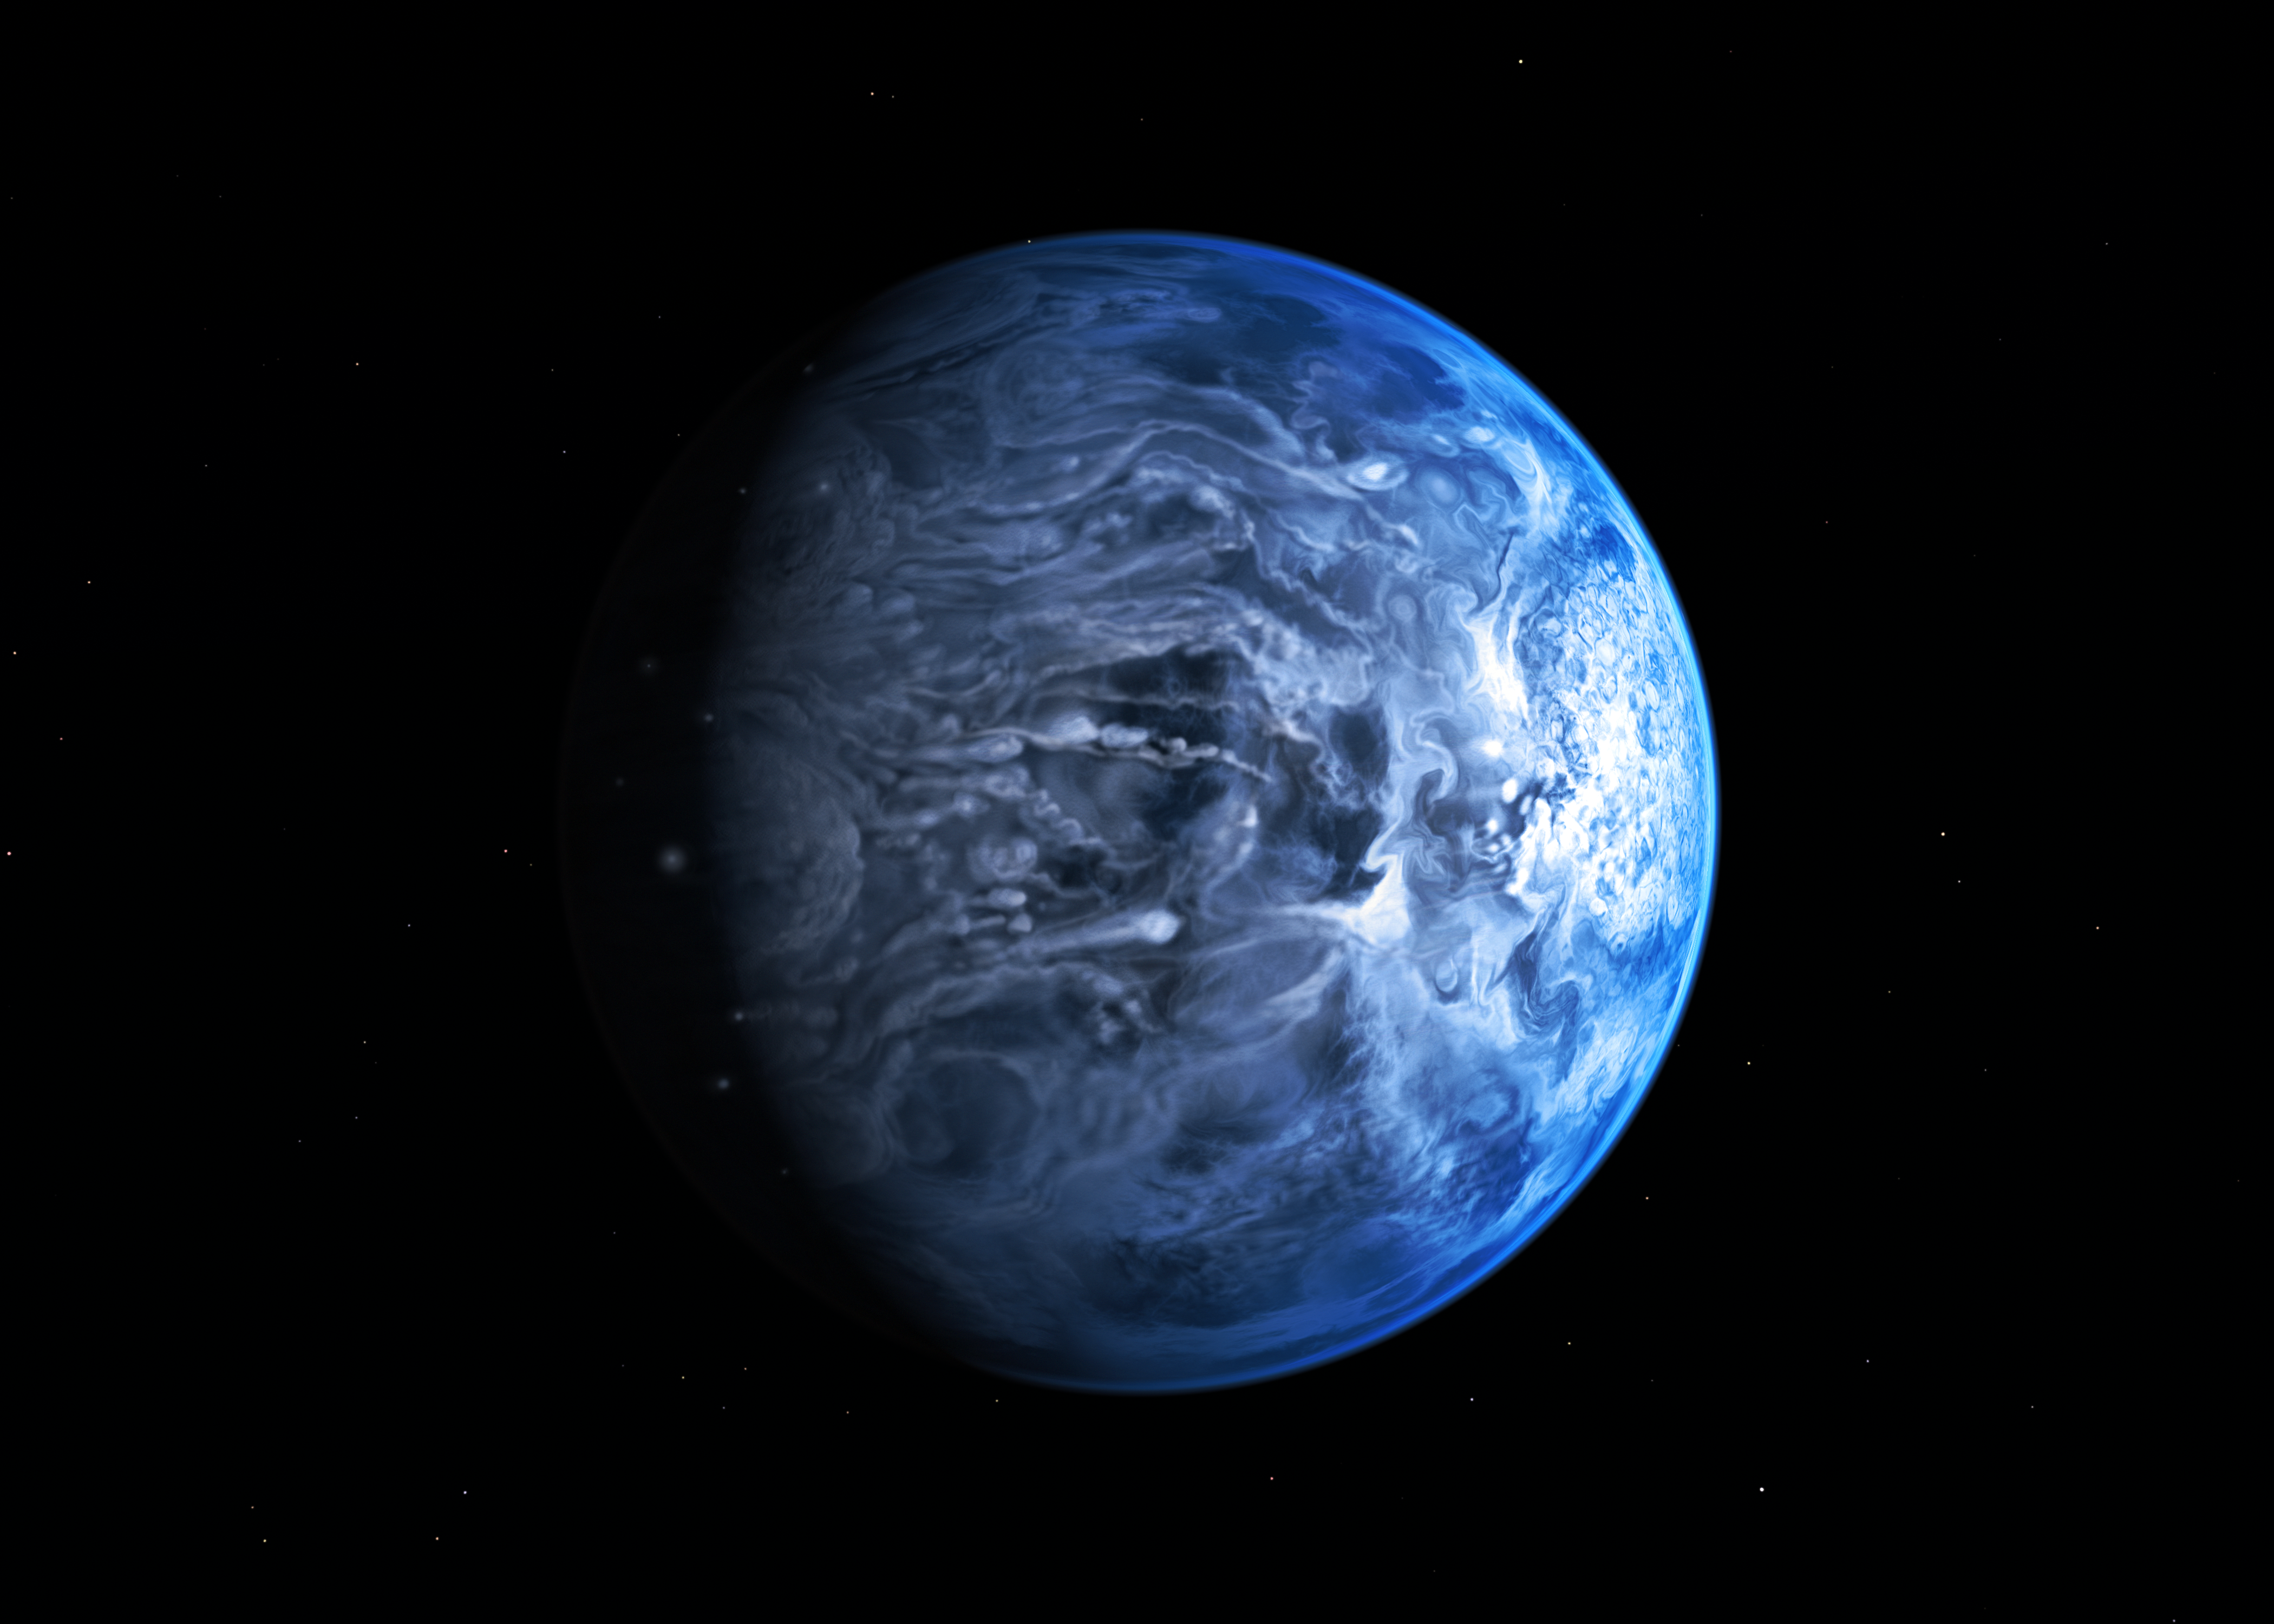

Artist’s impression of the deep blue planet HD 189733b

This illustration shows HD 189733b, a huge gas giant that orbits very close to its host star HD 189733. The planet's atmosphere is scorching with a temperature of over 1000 degrees Celsius, and it rains glass, sideways, in howling 7000 kilometre-per-hour winds.

At a distance of 63 light-years from us, this turbulent alien world is one of the nearest exoplanets to Earth that can be seen crossing the face of its star. By observing this planet before, during, and after it disappeared behind its host star during orbit, astronomers were able to deduce that HD 189733b is a deep, azure blue — reminiscent of Earth's colour as seen from space.

Credit: NASA, ESA, M. Kornmesser